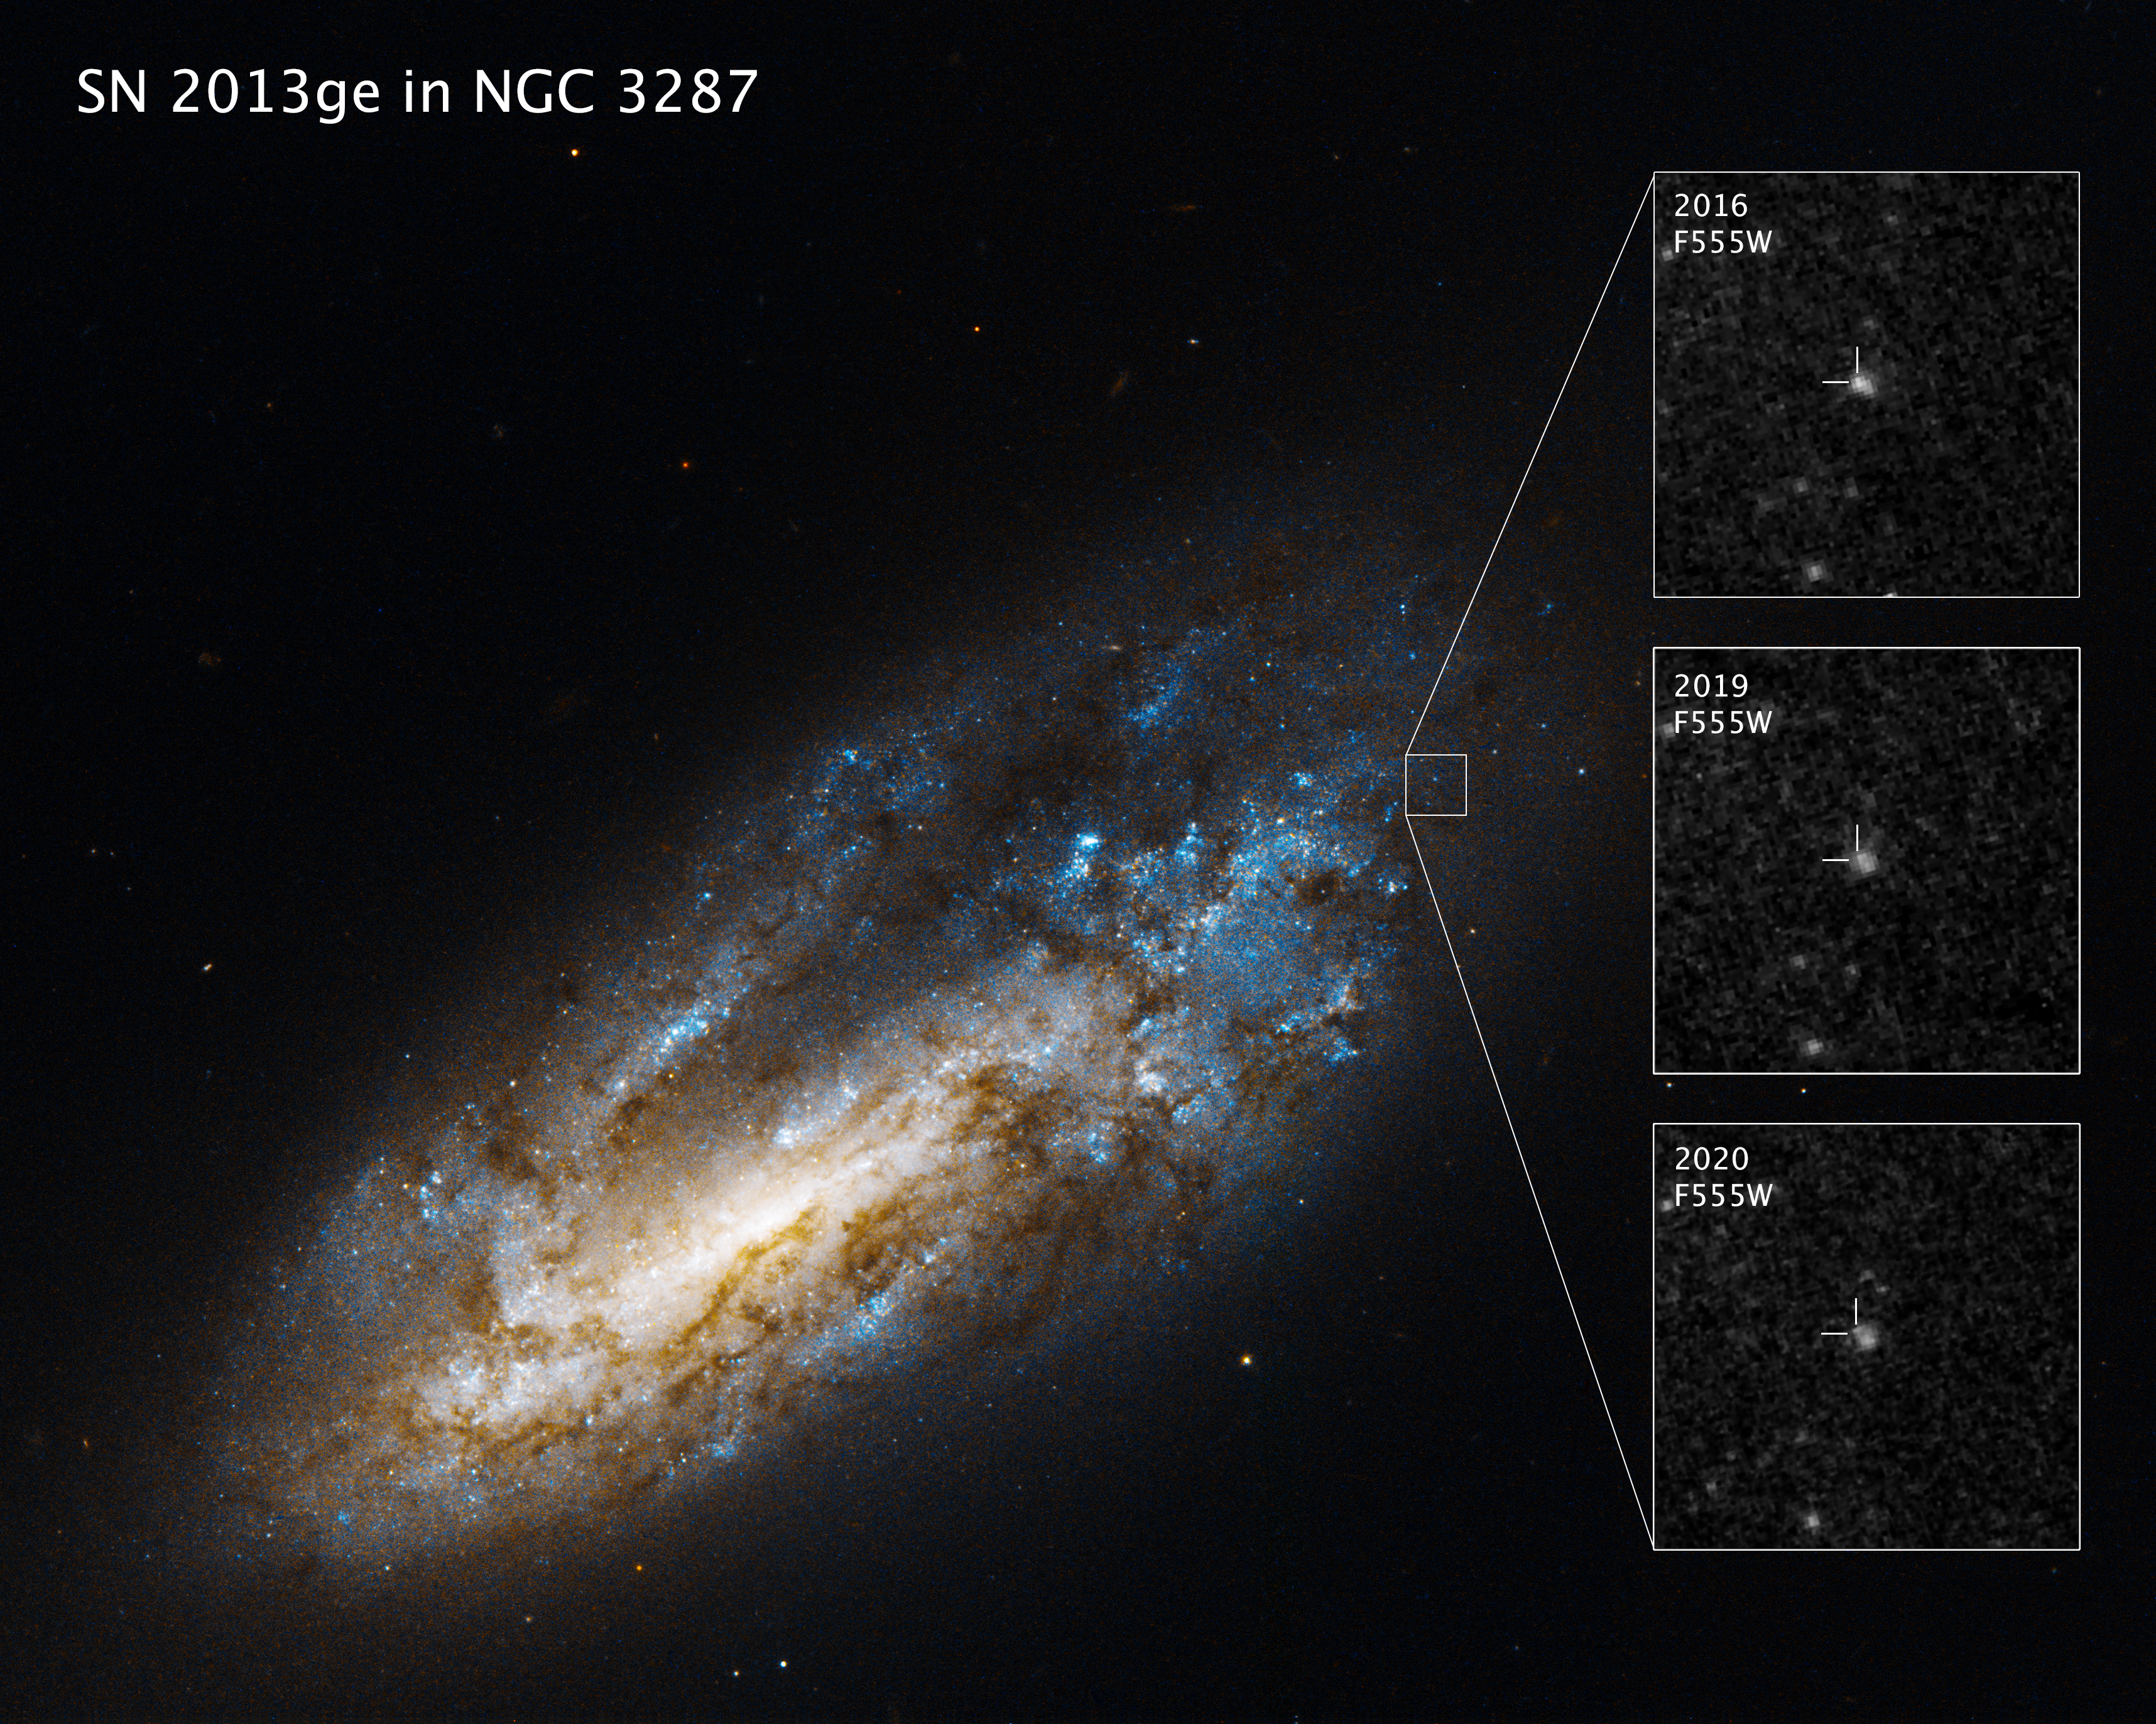

Hubble Reveals Surviving Companion Star In Aftermath Of Supernova

Hubble has uncovered a witness at the scene of a star's explosive death: a companion star previously hidden in the glare of its partner's supernova. The discovery is a first for a particular type of supernova—one in which the star was stripped of its entire outer gas envelope before exploding. The finding provides crucial insight into the binary nature of massive stars, as well as the potential prequel to the ultimate merger of the companion stars that would rattle across the universe as gravitational waves, ripples in the fabric of spacetime itself.

This visual presents Hubble images of galaxy NGC 3287 and the supernova 2013ge fading over time, revealing the steady source of ultraviolet light astronomers have identified as its binary companion star.

Credit: NASA, ESA, O. Fox (STScI), J. DePasquale (STScI)